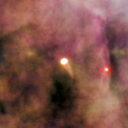

159-338

One of 42 new proplyds discovered in the Orion Nebula, 159-338 is one of the bright proplyds that lies relatively close to the nebula’s brightest star, Theta 1 Orionis C. This tadpole-shaped tail is actually a jet of matter flowing away from the excited cusp.

Credit: NASA/ESA and L. Ricci (ESO)